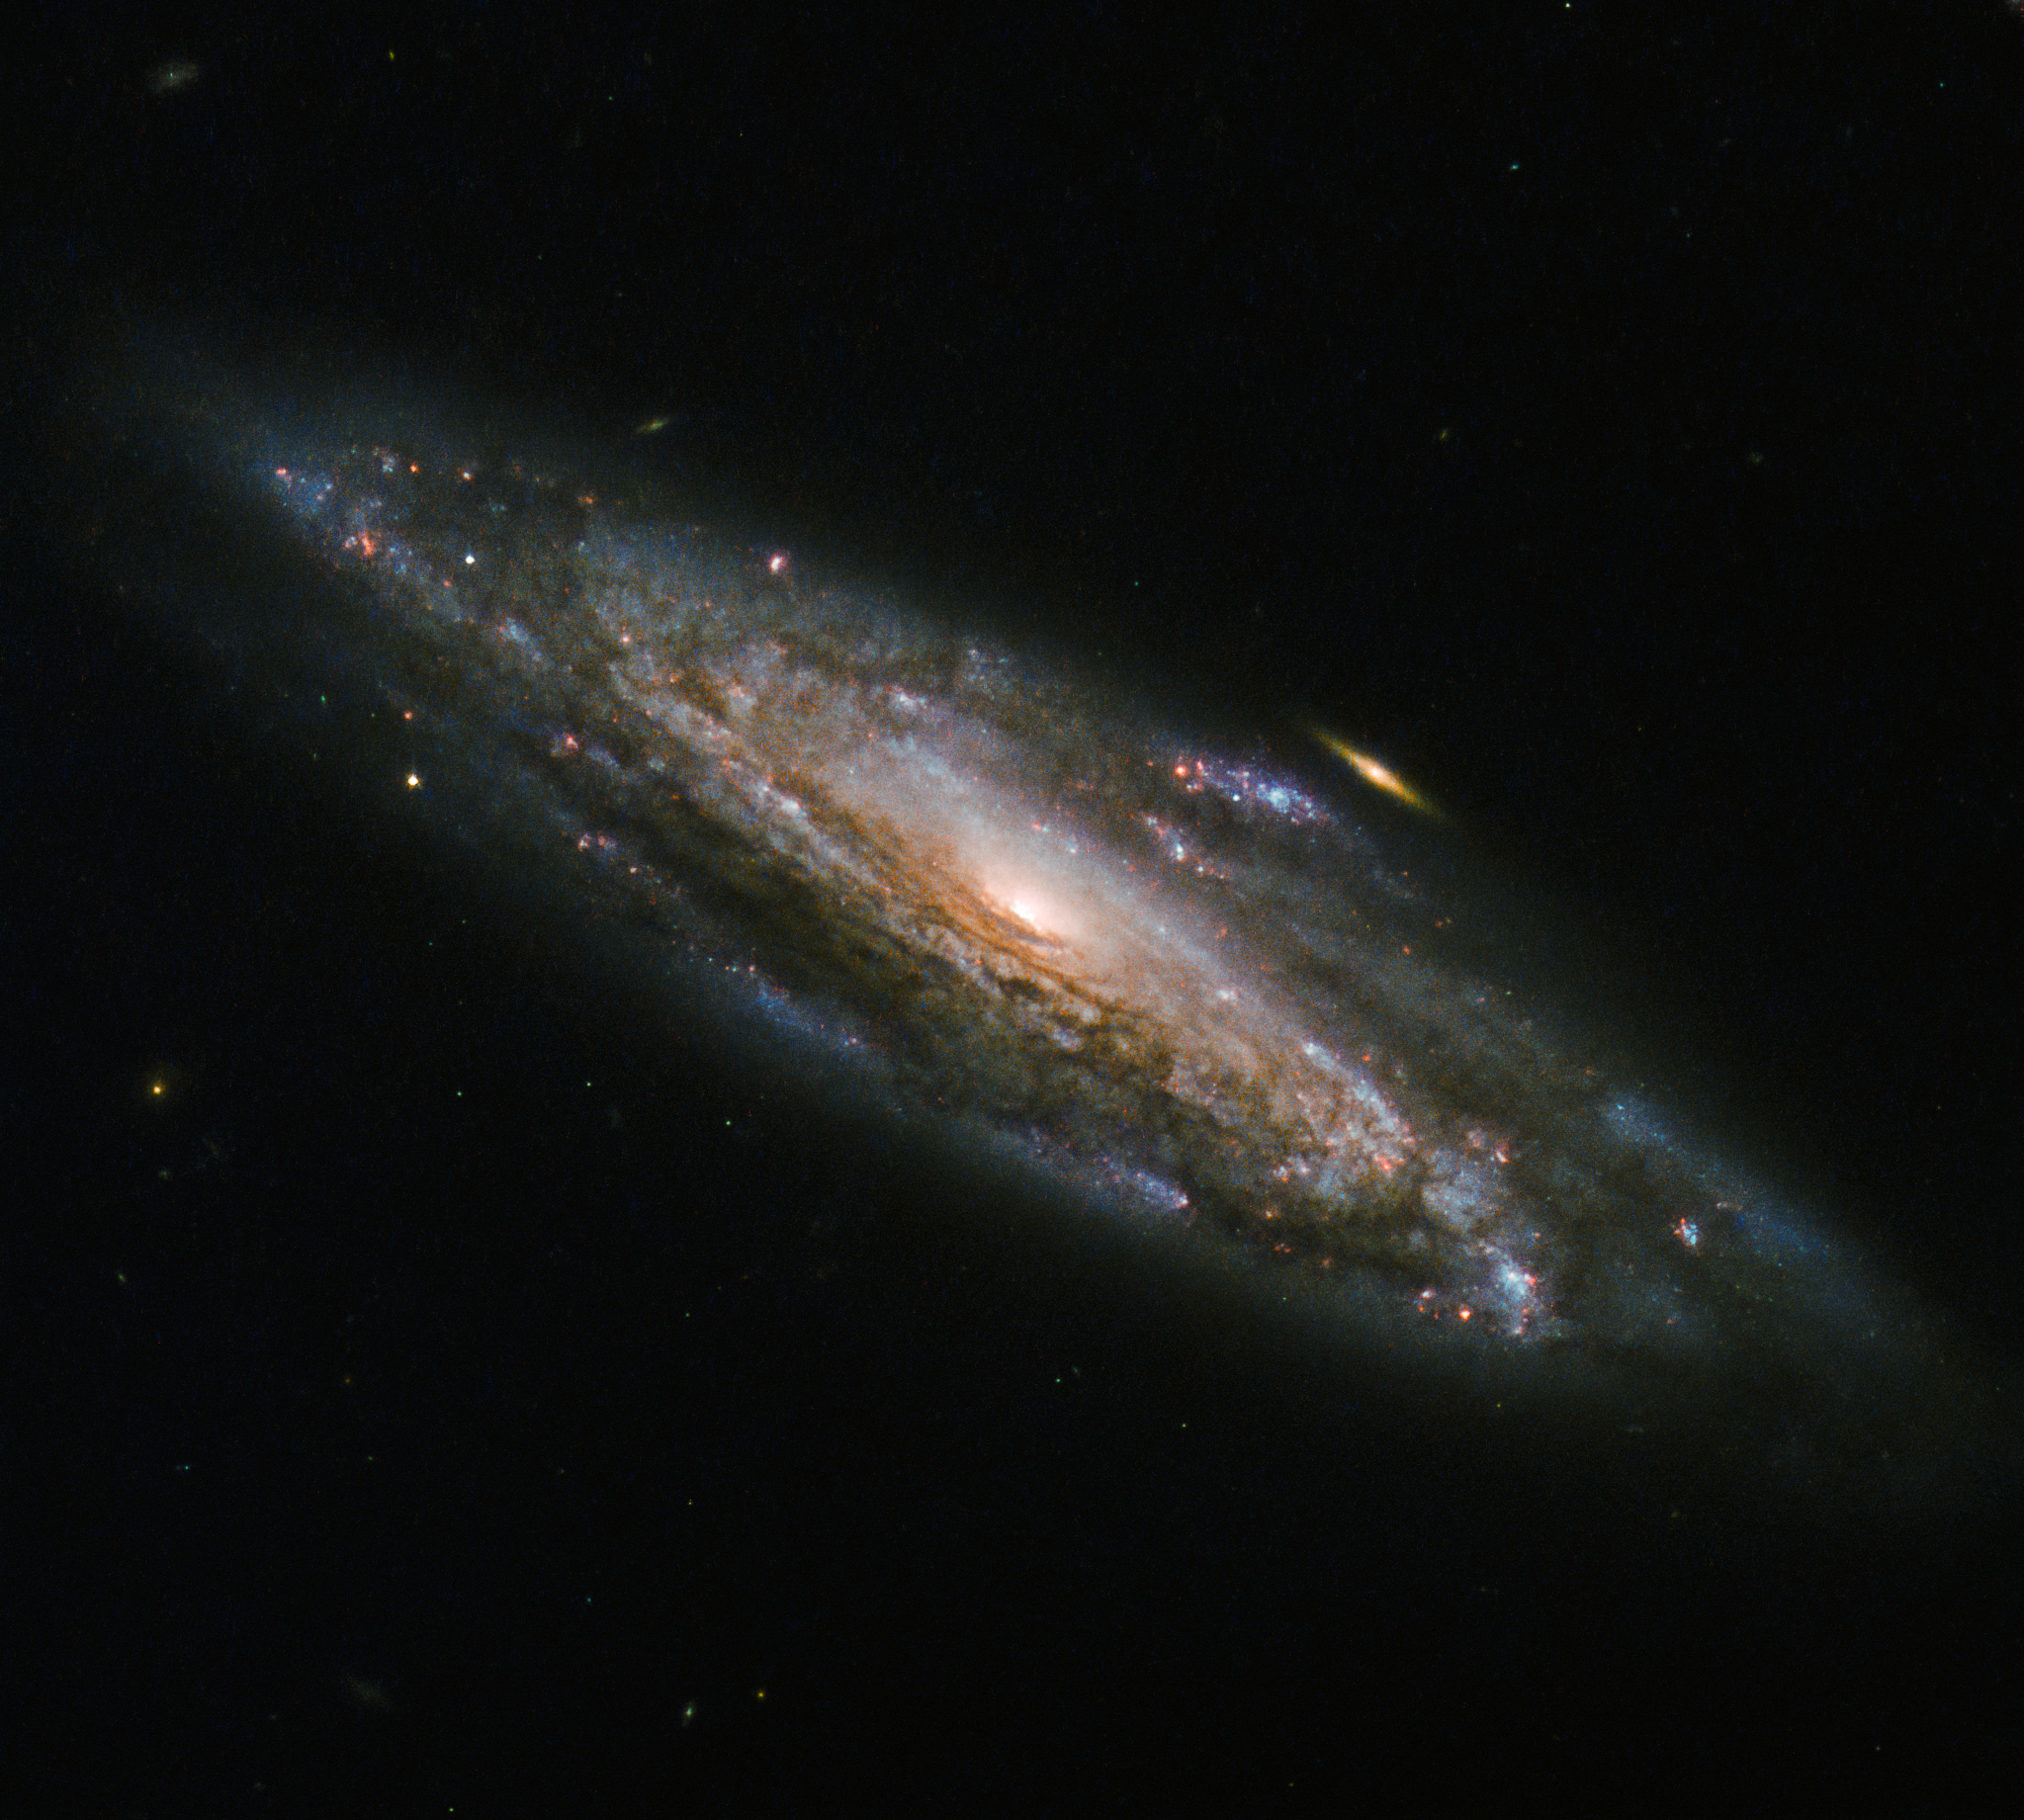

Mysterious supernovae

Like firecrackers lighting up the sky on New Year’s Eve, the majestic spiral arms of NGC 5559 are alight with new stars being born. NGC 5559 is a spiral galaxy, with spiral arms filled with gas and dust sweeping out around the bright galactic bulge. These arms are a rich environment for star formation, dotted with a festive array of colours including the newborn stars glowing blue as a result of their immensely high temperatures.

NGC 5559 was discovered by astronomer William Herschel in 1785 and lies approximately 240 million light-years away in the northern constellation of Boötes (the herdsman)

In 2001, a calcium-rich supernova called 2001co was observed in NGC 5559. Calcium-rich supernovae (Ca-rich SNe) are described as “fast-and-faint”, as they're less luminous than other types of supernovae and also evolve more rapidly, to reveal spectra dominated by strong calcium lines. 2001co occurred within the disc of NGC 5559 near star-forming regions, but Ca-rich SNe are often observed at large distances from the nearest galaxy, raising curious questions about their progenitors.

Credit: ESA/Hubble & NASA